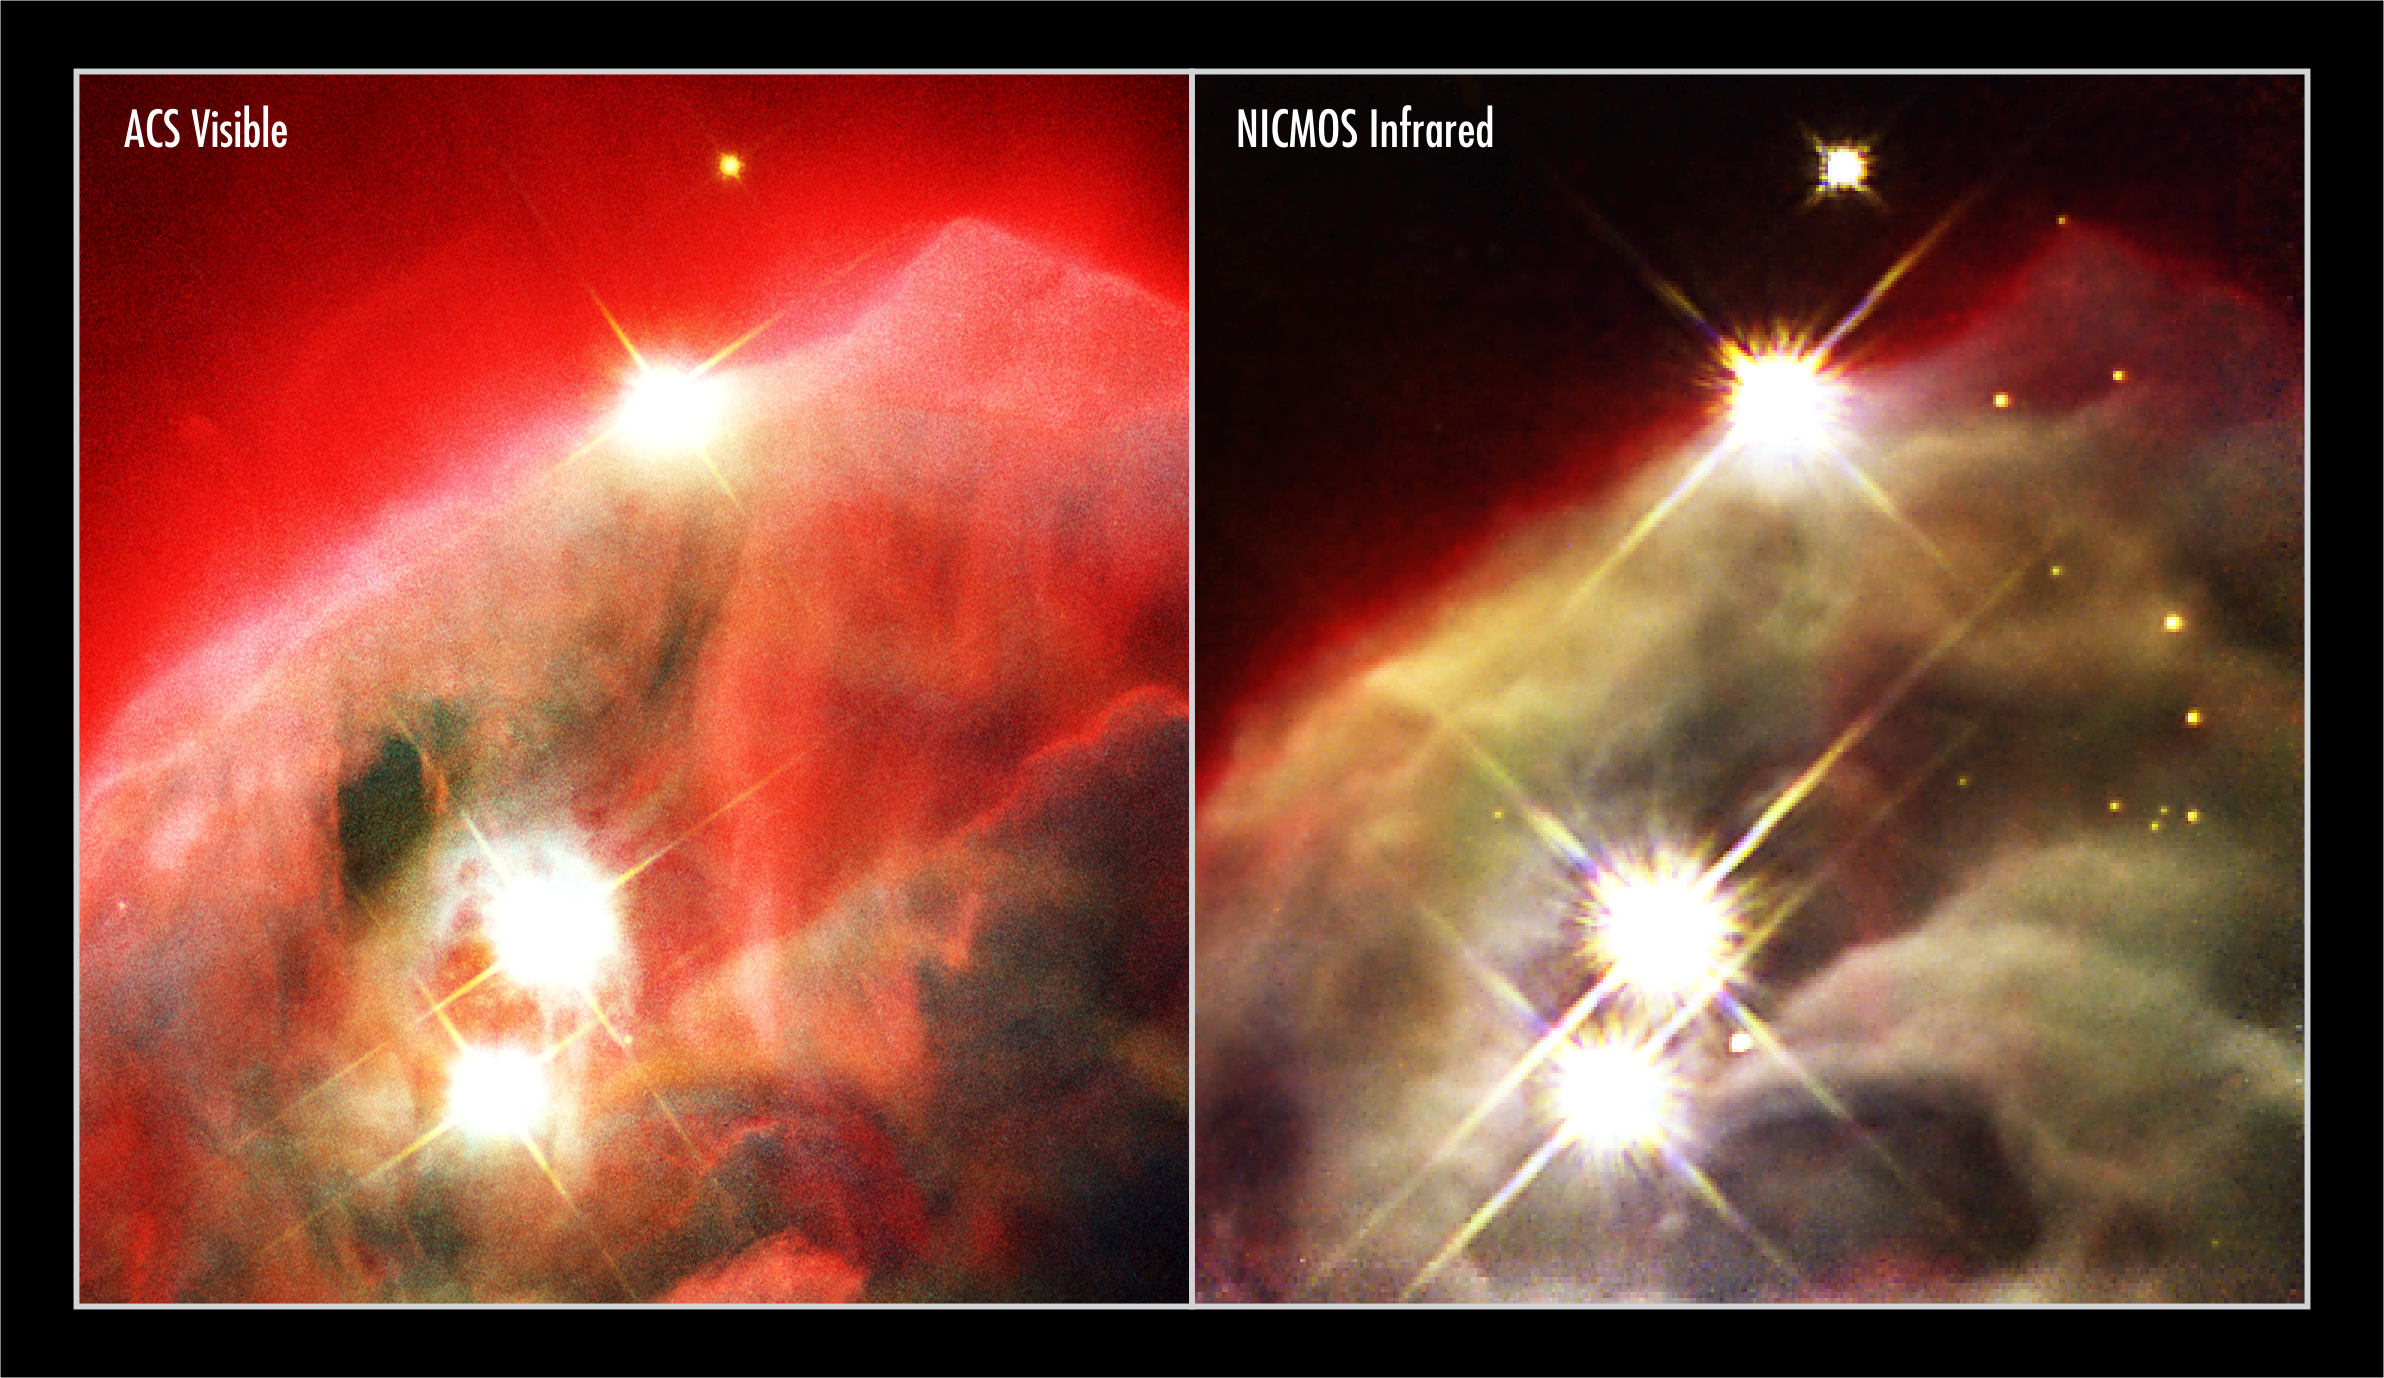

Hubble provides two sharp eyes to see birth of stars in galactic wreckage

The revived Near Infrared Camera and Multi-Object Spectrometer (NICMOS) aboard the NASA/ESA Hubble Space Telescope has penetrated dust layers in a star-forming cloud to uncover a dense, craggy edifice of dust and gas [image at right]. This region is called the Cone Nebula (NGC 2264), so named because, in ground-based images, it has a conical shape. NICMOS enables the Hubble telescope to see near-infrared wavelengths of light, so that it can penetrate the dust that obscures the nebula's inner regions. However, the Cone is so dense even the near-infrared 'eyes' of NICMOS cannot penetrate all the way through it. The image shows the upper 0.5 light-years of the nebula. The entire nebula is 7 light-years long. The Cone resides in a turbulent star-forming region, located 2500 light-years away in the constellation Monoceros. Radiation from hot, young stars [located beyond the top of the image] has slowly eroded the nebula over millions of years. Ultraviolet light heats the edges of the dark cloud, releasing gas into the relatively empty region of surrounding space. NICMOS has uncovered the outer layers of dust to reveal even denser dust. The denser regions give the nebula a more three-dimensional structure than can be seen in the visible-light picture at left, taken by the Advanced Camera for Surveys aboard the Hubble telescope. In peering through the dusty facade to the nebula's inner regions, NICMOS has unmasked several stars [yellow dots at upper right]. Astronomers do not know whether these stars are behind the dusty nebula or embedded in it. The four bright stars lined up on the left are in front of the nebula. The human eye cannot see infrared light so colours have been assigned to correspond to near-infrared wavelengths. The blue light represents shorter near-infrared wavelengths and the red light corresponds to longer wavelengths. The NICMOS colour composite image was made by combining photographs taken through J-band, H-band, and Paschen-alpha filters. The NICMOS images were taken on 11 May 2002. Credits for NICMOS image: NASA, ESA, the NICMOS Group (STScI, ESA) and the NICMOS Science Team (Univ. of Arizona) Credits for ACS image: NASA, ESA, H. Ford (JHU), G. Illingworth (UCSC/LO), M.Clampin (STScI), G. Hartig (STScI), the ACS Science Team, and ESA

Credit: NICMOS image: NASA, ESA, the NICMOS Group (STScI, ESA) and the NICMOS Science Team (Univ. of Arizona). ACS image: NASA, ESA, H. Ford (JHU), G. Illingworth (UCSC/LO), M.Clampin (STScI), G. Hartig (STScI) and the ACS Science Team